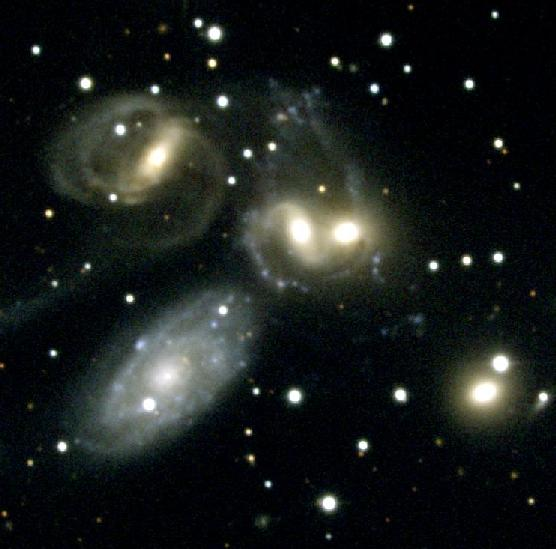

Stephan's Quintet [NOAO] (ground-based image)

Studying the star clusters and dwarf galaxies in Stephan's Quintet provides insights into how galactic encounters may have driven galaxy evolution in the early universe. The quintet resides 270 million light-years from Earth in the constellation Pegasus.

Credit: NASA & ESA